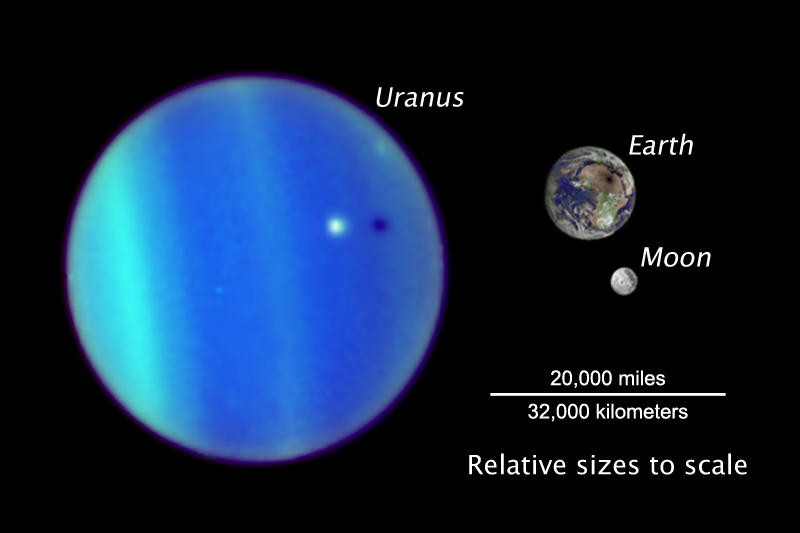

Uranus/Ariel - Earth/Moon Size Comparison

This illustrates the relative sizes of Uranus, Earth and Earth's Moon. The images are shown at the proper relative size, but not the correct relative distance from each other. Uranus is approximately 31,000 miles (50,000 kilometers) in diameter, or about four times the size of Earth. The Earth is approximately 7,900 miles (12,800 kilometers) in diameter, or about four times the diameter of the Moon, 2,100 miles (3,500 kilometers).

Credit: NASA, ESA, and L. Sromovsky (University of Wisconsin)